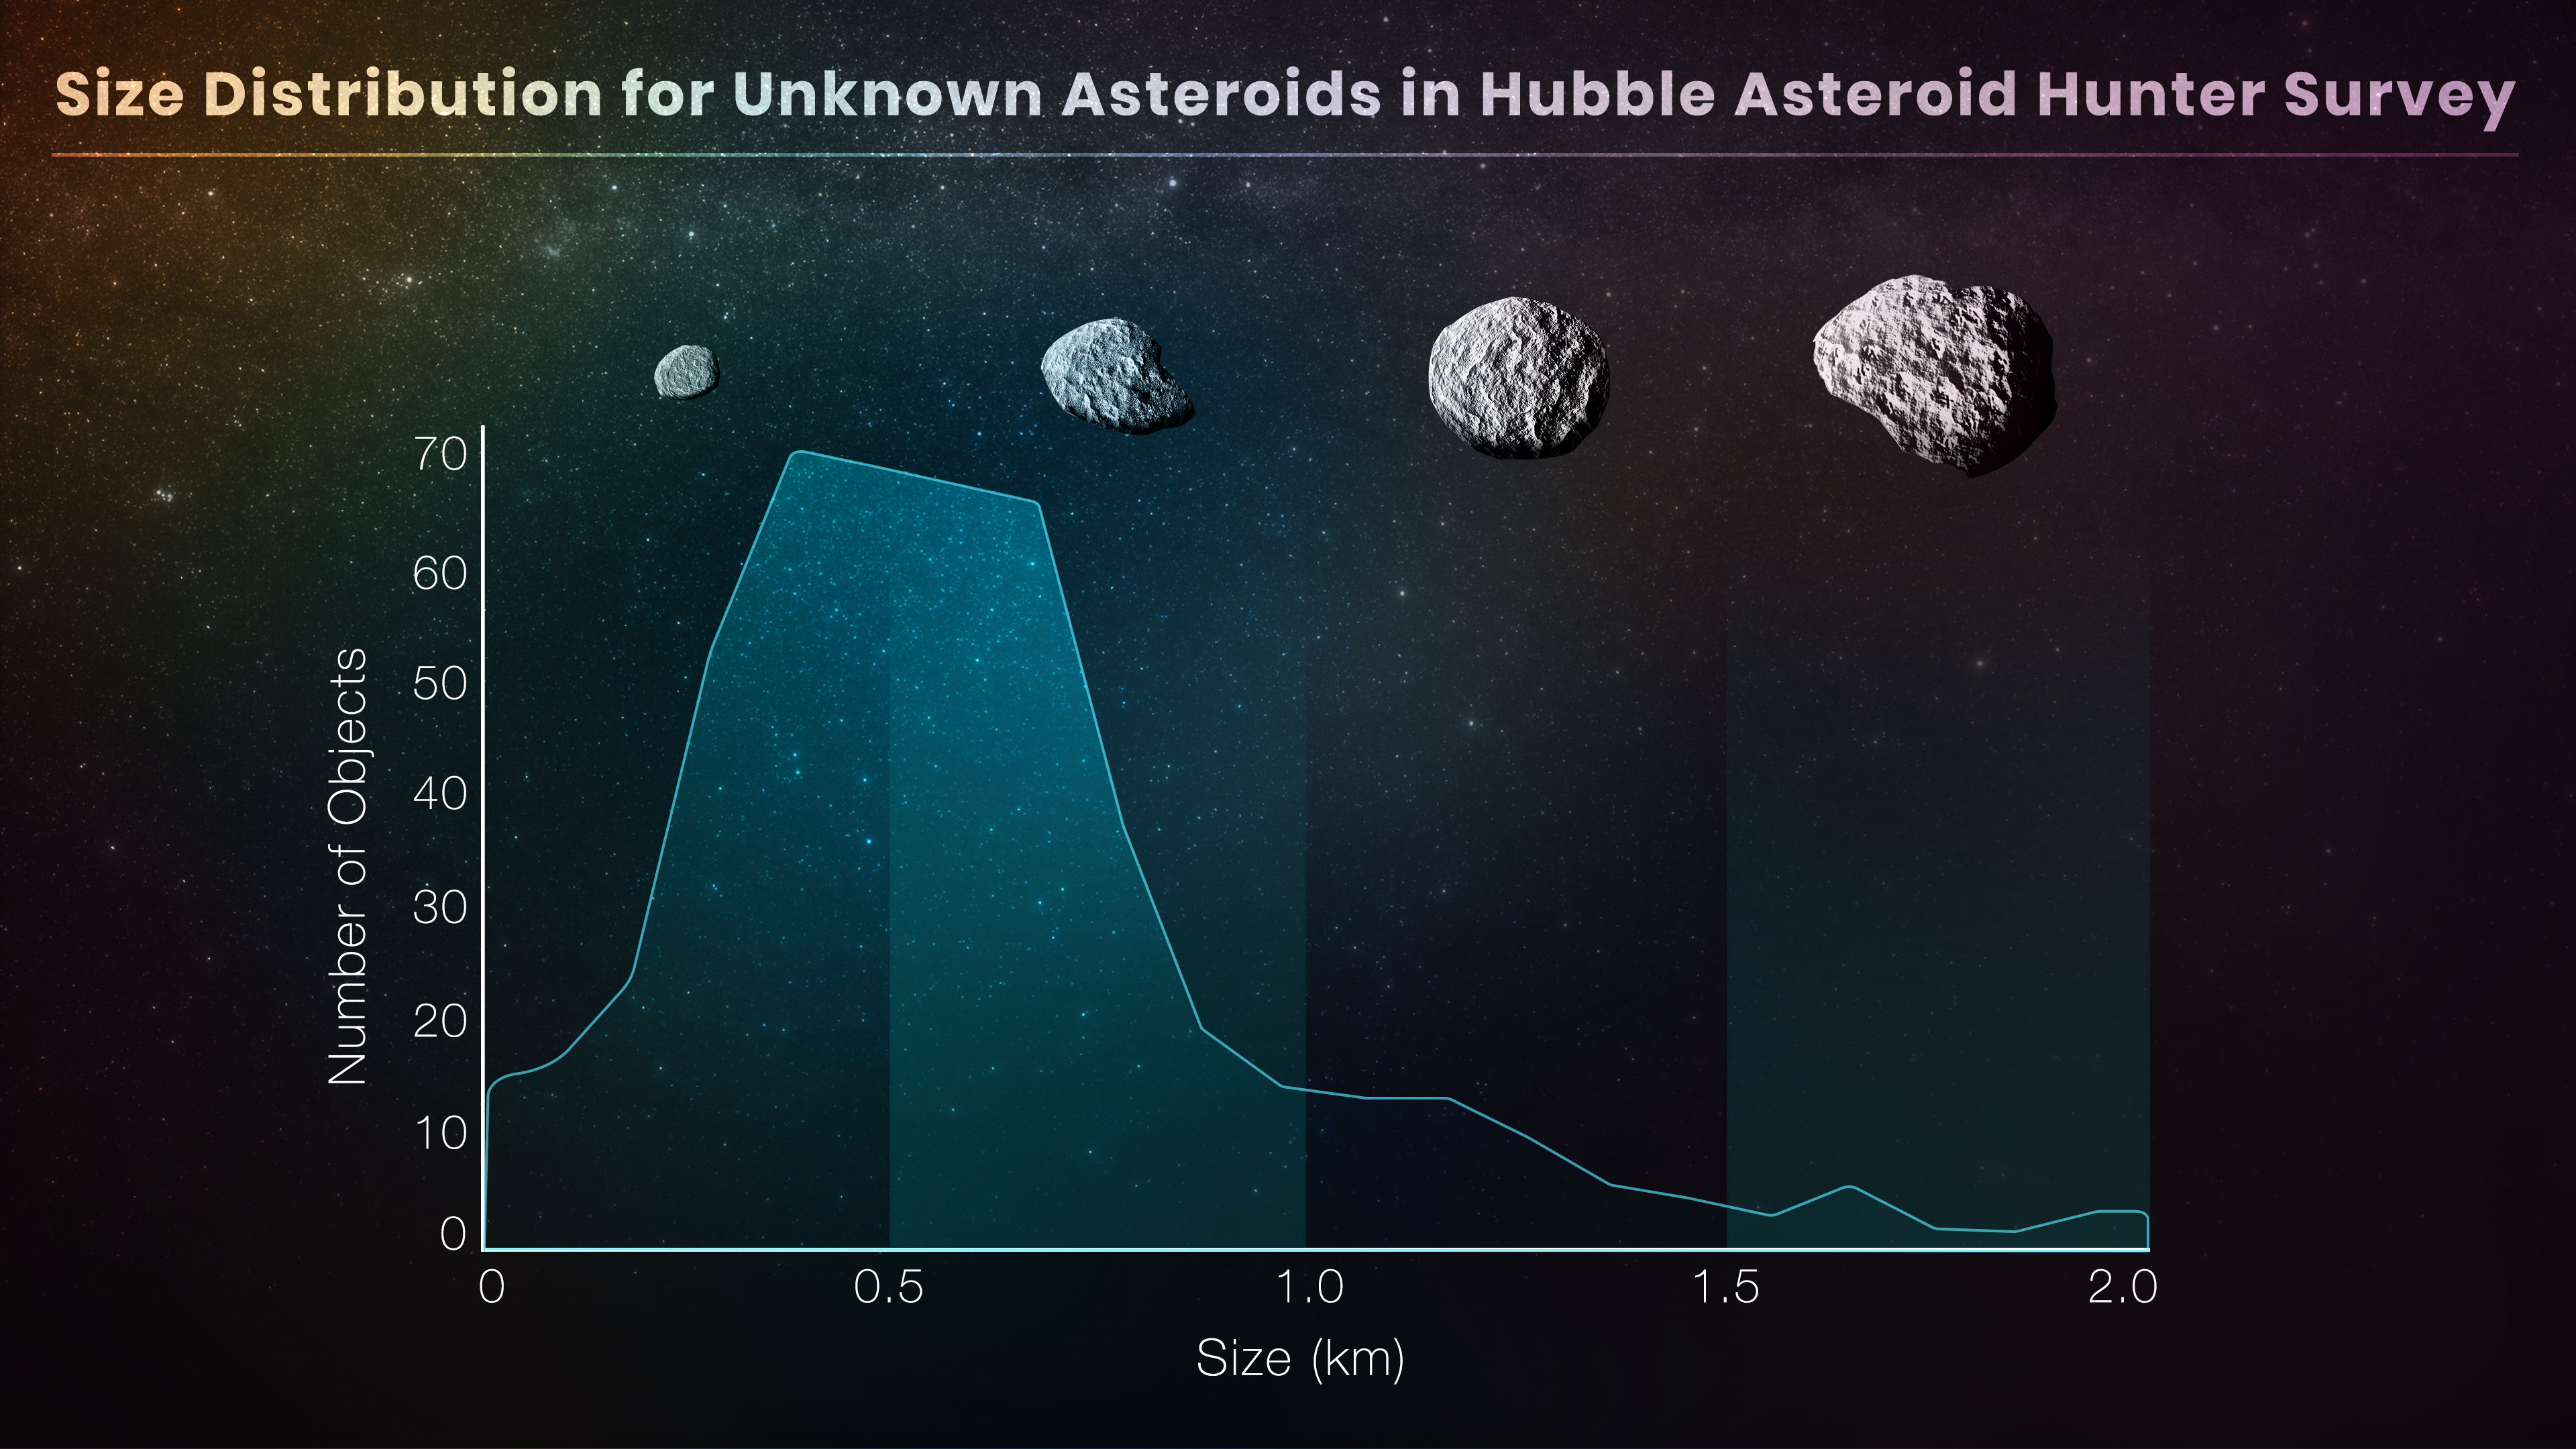

Size distribution for unknown asteroids in Hubble asteroid hunter survey

This graph is based on Hubble Space Telescope archival data that were used to identify a largely unseen population of very small asteroids. The asteroids were not the intended targets, but instead photobombed background stars and galaxies in Hubble images. The comprehensive treasure hunt required perusing 37 000 Hubble images spanning 19 years. This was accomplished by using ‘citizen science’ volunteers and artificial intelligence algorithms. The payoff was finding 1701 trails of previously undetected asteroids.

Credit: NASA, ESA, P. G. Martín (Autonomous University of Madrid), E. Wheatley (STScI)